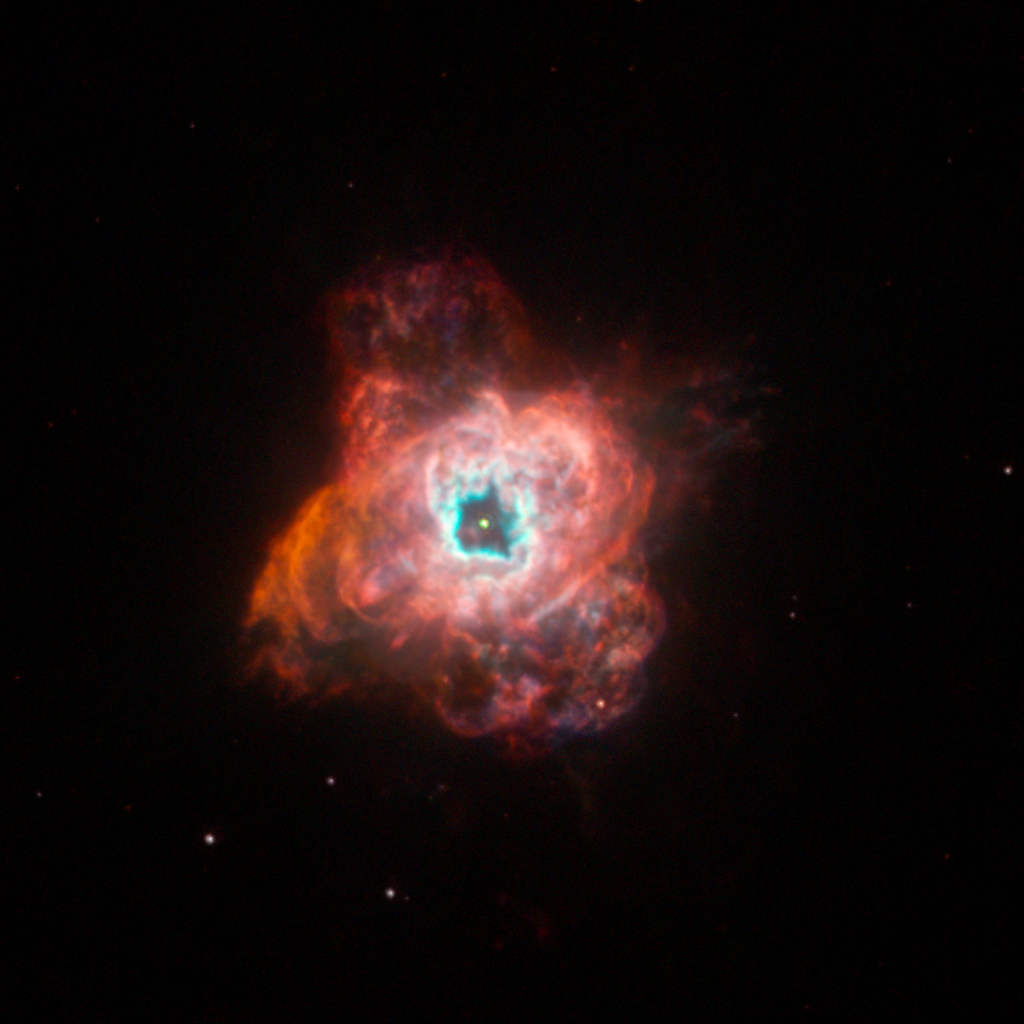

NGC 5315

NGC 5315

Credit: NASA, ESA, and The Hubble Heritage Team (STScI/AURA)